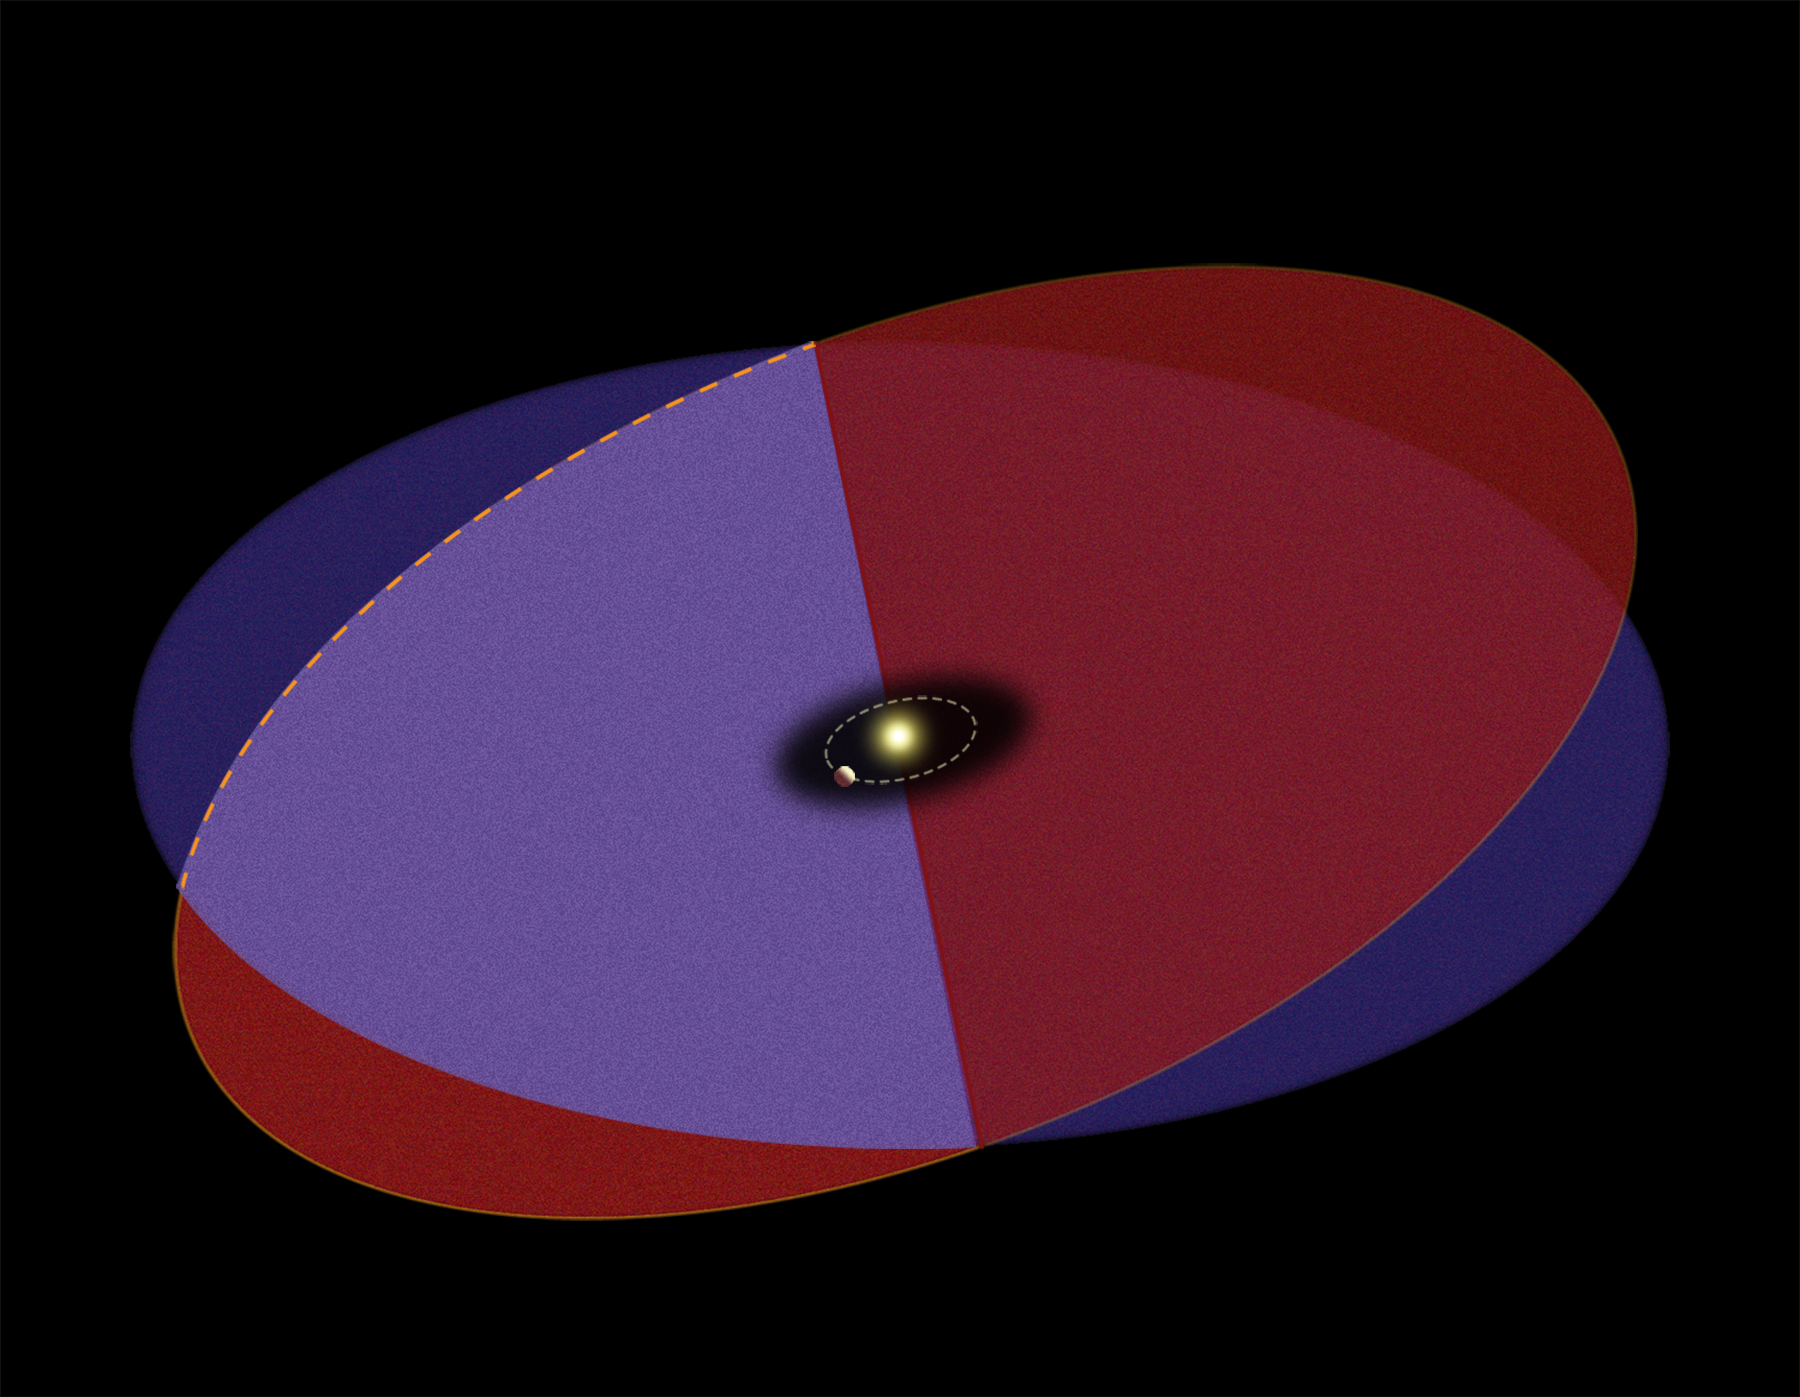

Beta Pictoris - intersecting disks schematicWithout Text

Detailed images of the nearby star Beta Pictoris, taken by NASA/ESA Hubble Space Telescope, confirm the existence of not one but two dust disks encircling the star. The images offer tantalizing new evidence for at least one Jupiter-size planet orbiting Beta Pictoris.

The finding ends a decade of scientific speculation that an odd warp in the young star's debris disk may actually be another inclined disk. The recent Hubble Advanced Camera for Surveys view - the best visible-light image of Beta Pictoris - clearly shows a distinct secondary disk that is tilted by about 4 degrees from the main disk. The secondary disk is visible out to roughly 24 billion miles (about 40 billion kilometres) from the star, and probably extends even farther, said astronomers. This Hubble image of Beta Pictoris clearly shows a primary dust disk and a much fainter secondary dust disk. Astronomers used the Advanced Camera's coronagraph to block out the light from the bright star.

Credit: NASA, ESA and A. Feild (STScI)